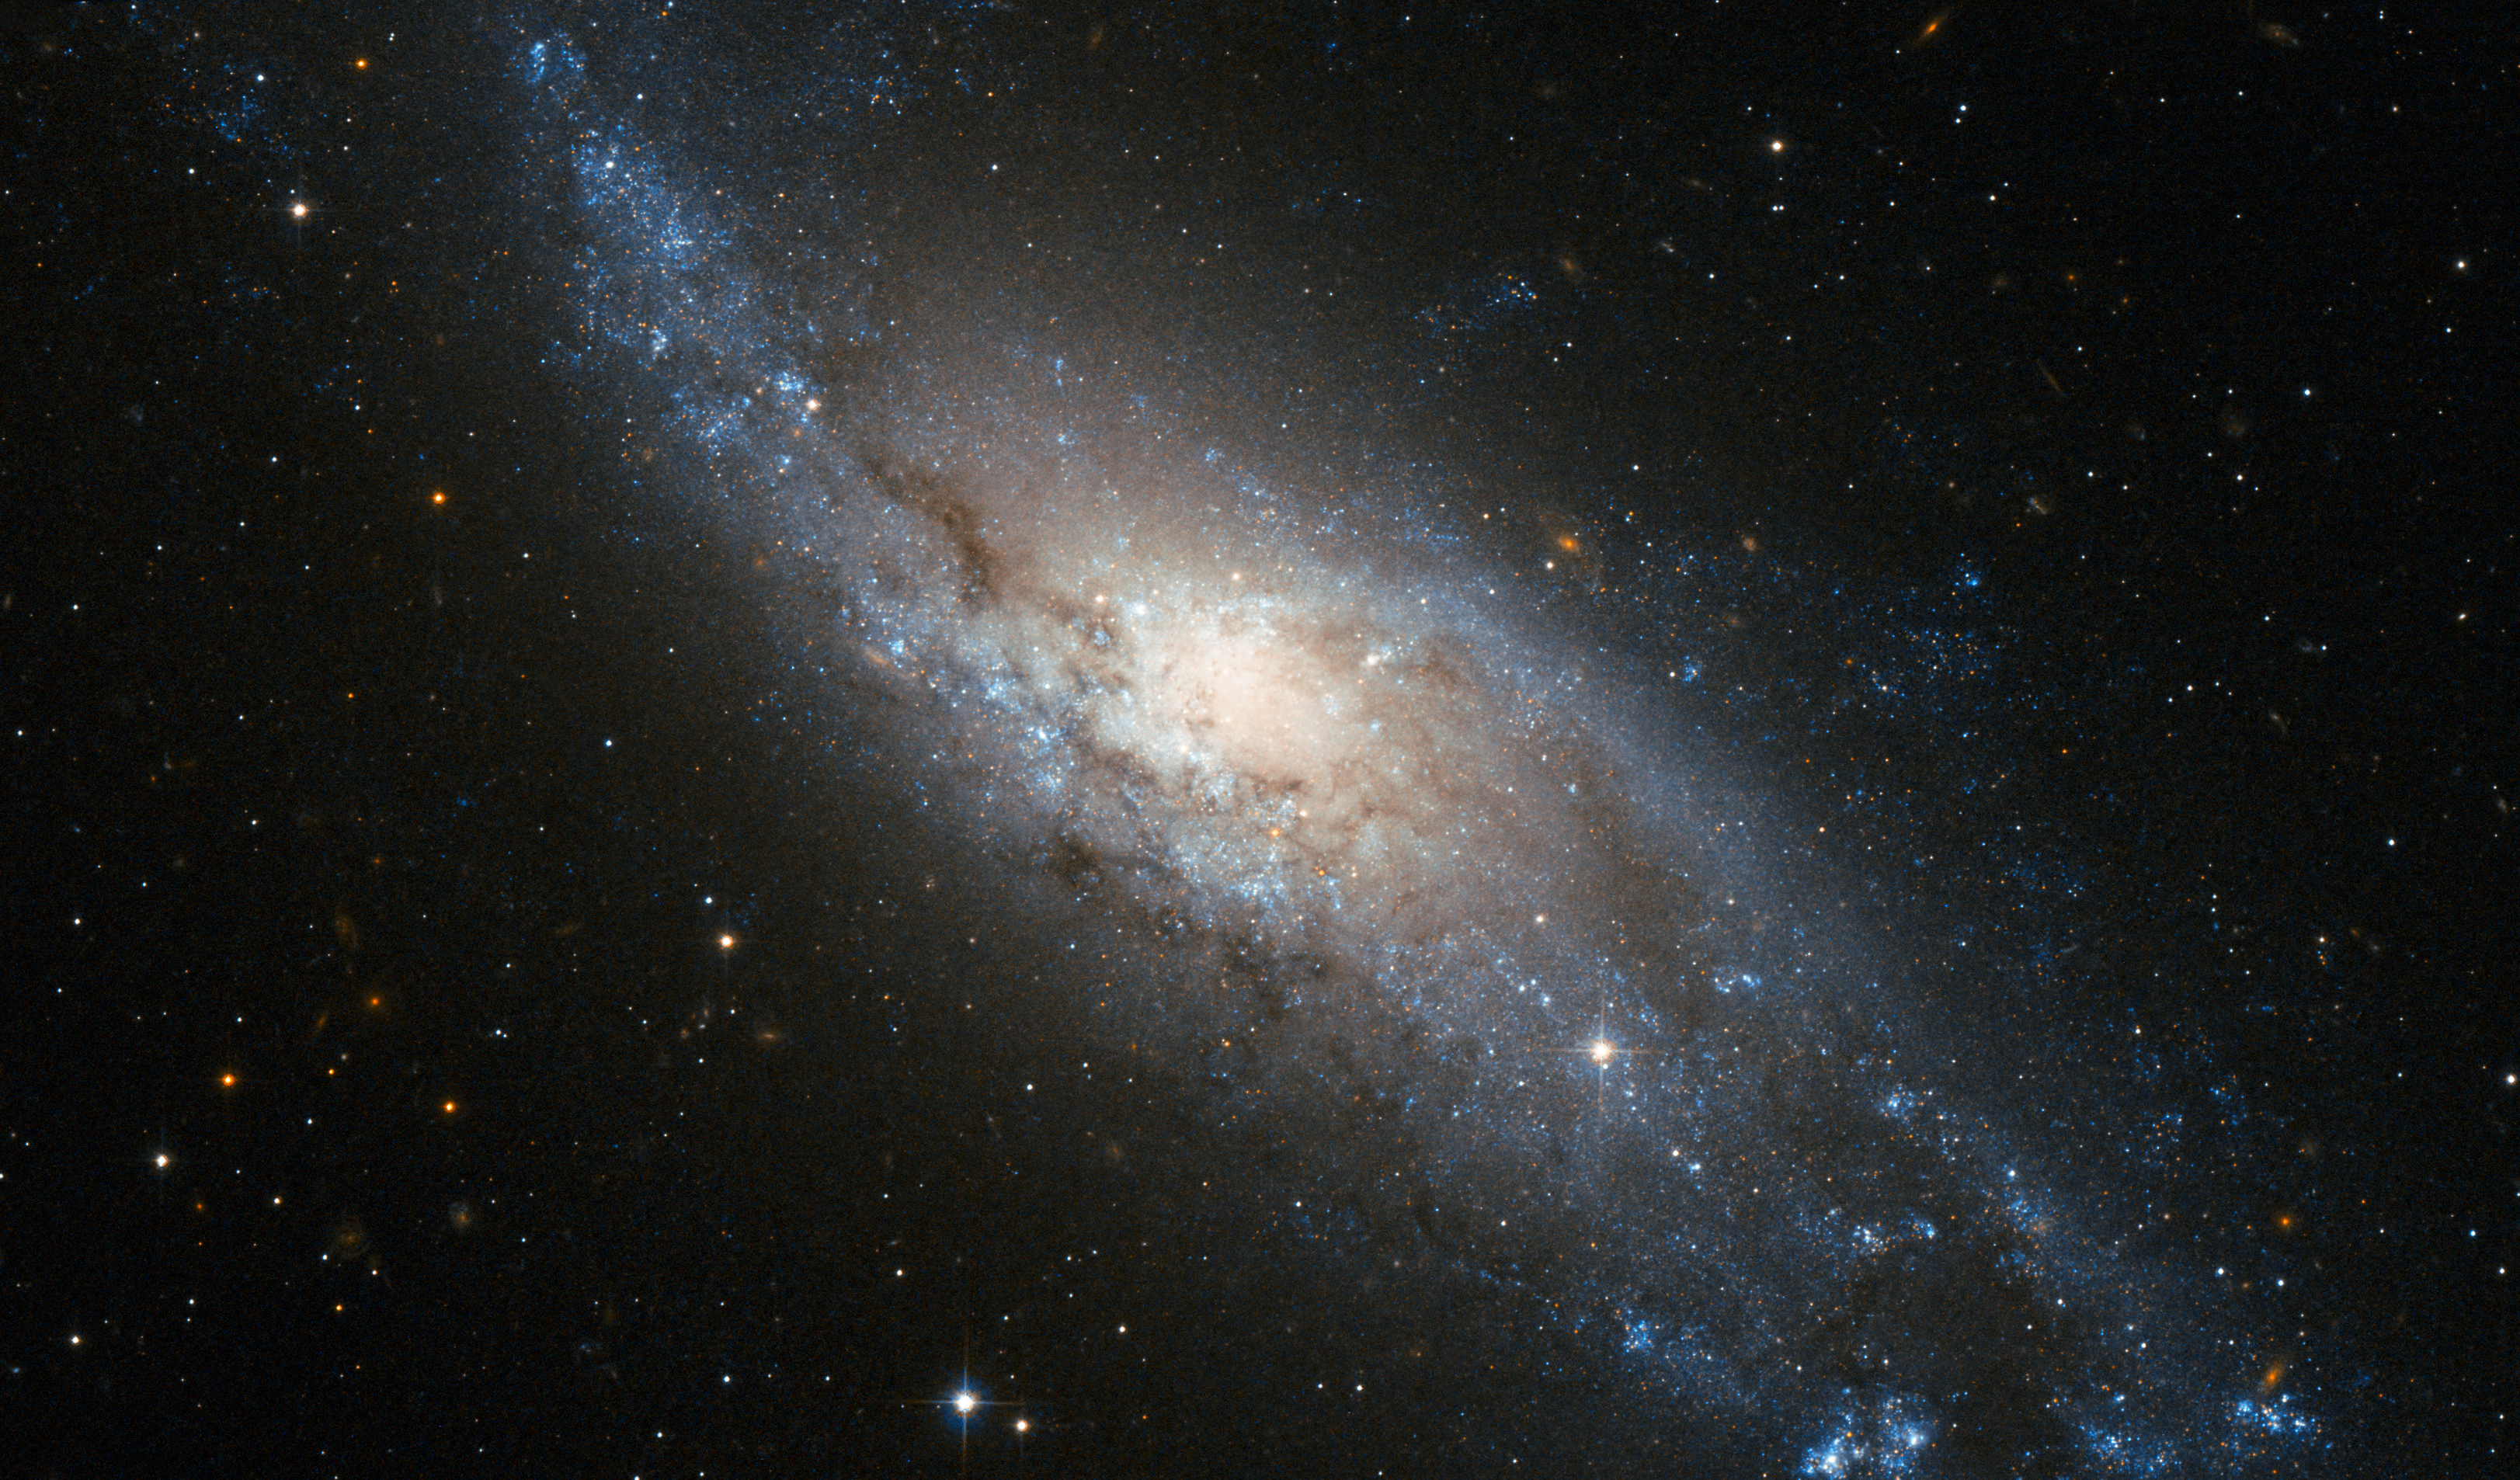

A cosmic whirlpool in Tucana

The beautiful spiral galaxy NGC 406 was discovered in 1834 by John Herschel and is here imaged in great detail by the NASA/ESA Hubble Space Telescope.

Located some 65 million light-years away, in the southern constellation of Tucana (the Toucan), NGC 406 is about 60 000 light-years across, roughly half the diameter of our galaxy, the Milky Way. It is a spiral galaxy quite similar to the well known Whirlpool galaxy (Messier 51, see http://www.spacetelescope.org/images/opo0110a/). In a moderate-sized amateur telescope NGC 406 would appear as a faint hazy blob, like thousands of others across the sky, and none of the spectacular fine detail in the Hubble picture could be made out.

In this image the galaxy exhibits spiral arms that are mainly populated by young, massive, bluish stars and crossed by dark dust lanes. As is typically observed in this kind of spiral galaxy, the yellowish central bulge, dominated by an older stellar population, is less prominent and almost totally embedded in the disk structure.

The deep image also shows a significant number of more distant galaxies in the background. Some of them are visible as reddish fuzzy spots through the bluish spiral arms of the foreground galaxy.

This picture was created from images taken through near-infrared (F814W) and blue (F435W) filters, shown in red and blue respectively, using the Wide Field Channel of Hubble’s Advanced Camera for Surveys. The exposure times were twenty minutes per filter and the field of view is 2.7 by 1.6 arcminutes.

Credit: ESA/Hubble and NASA